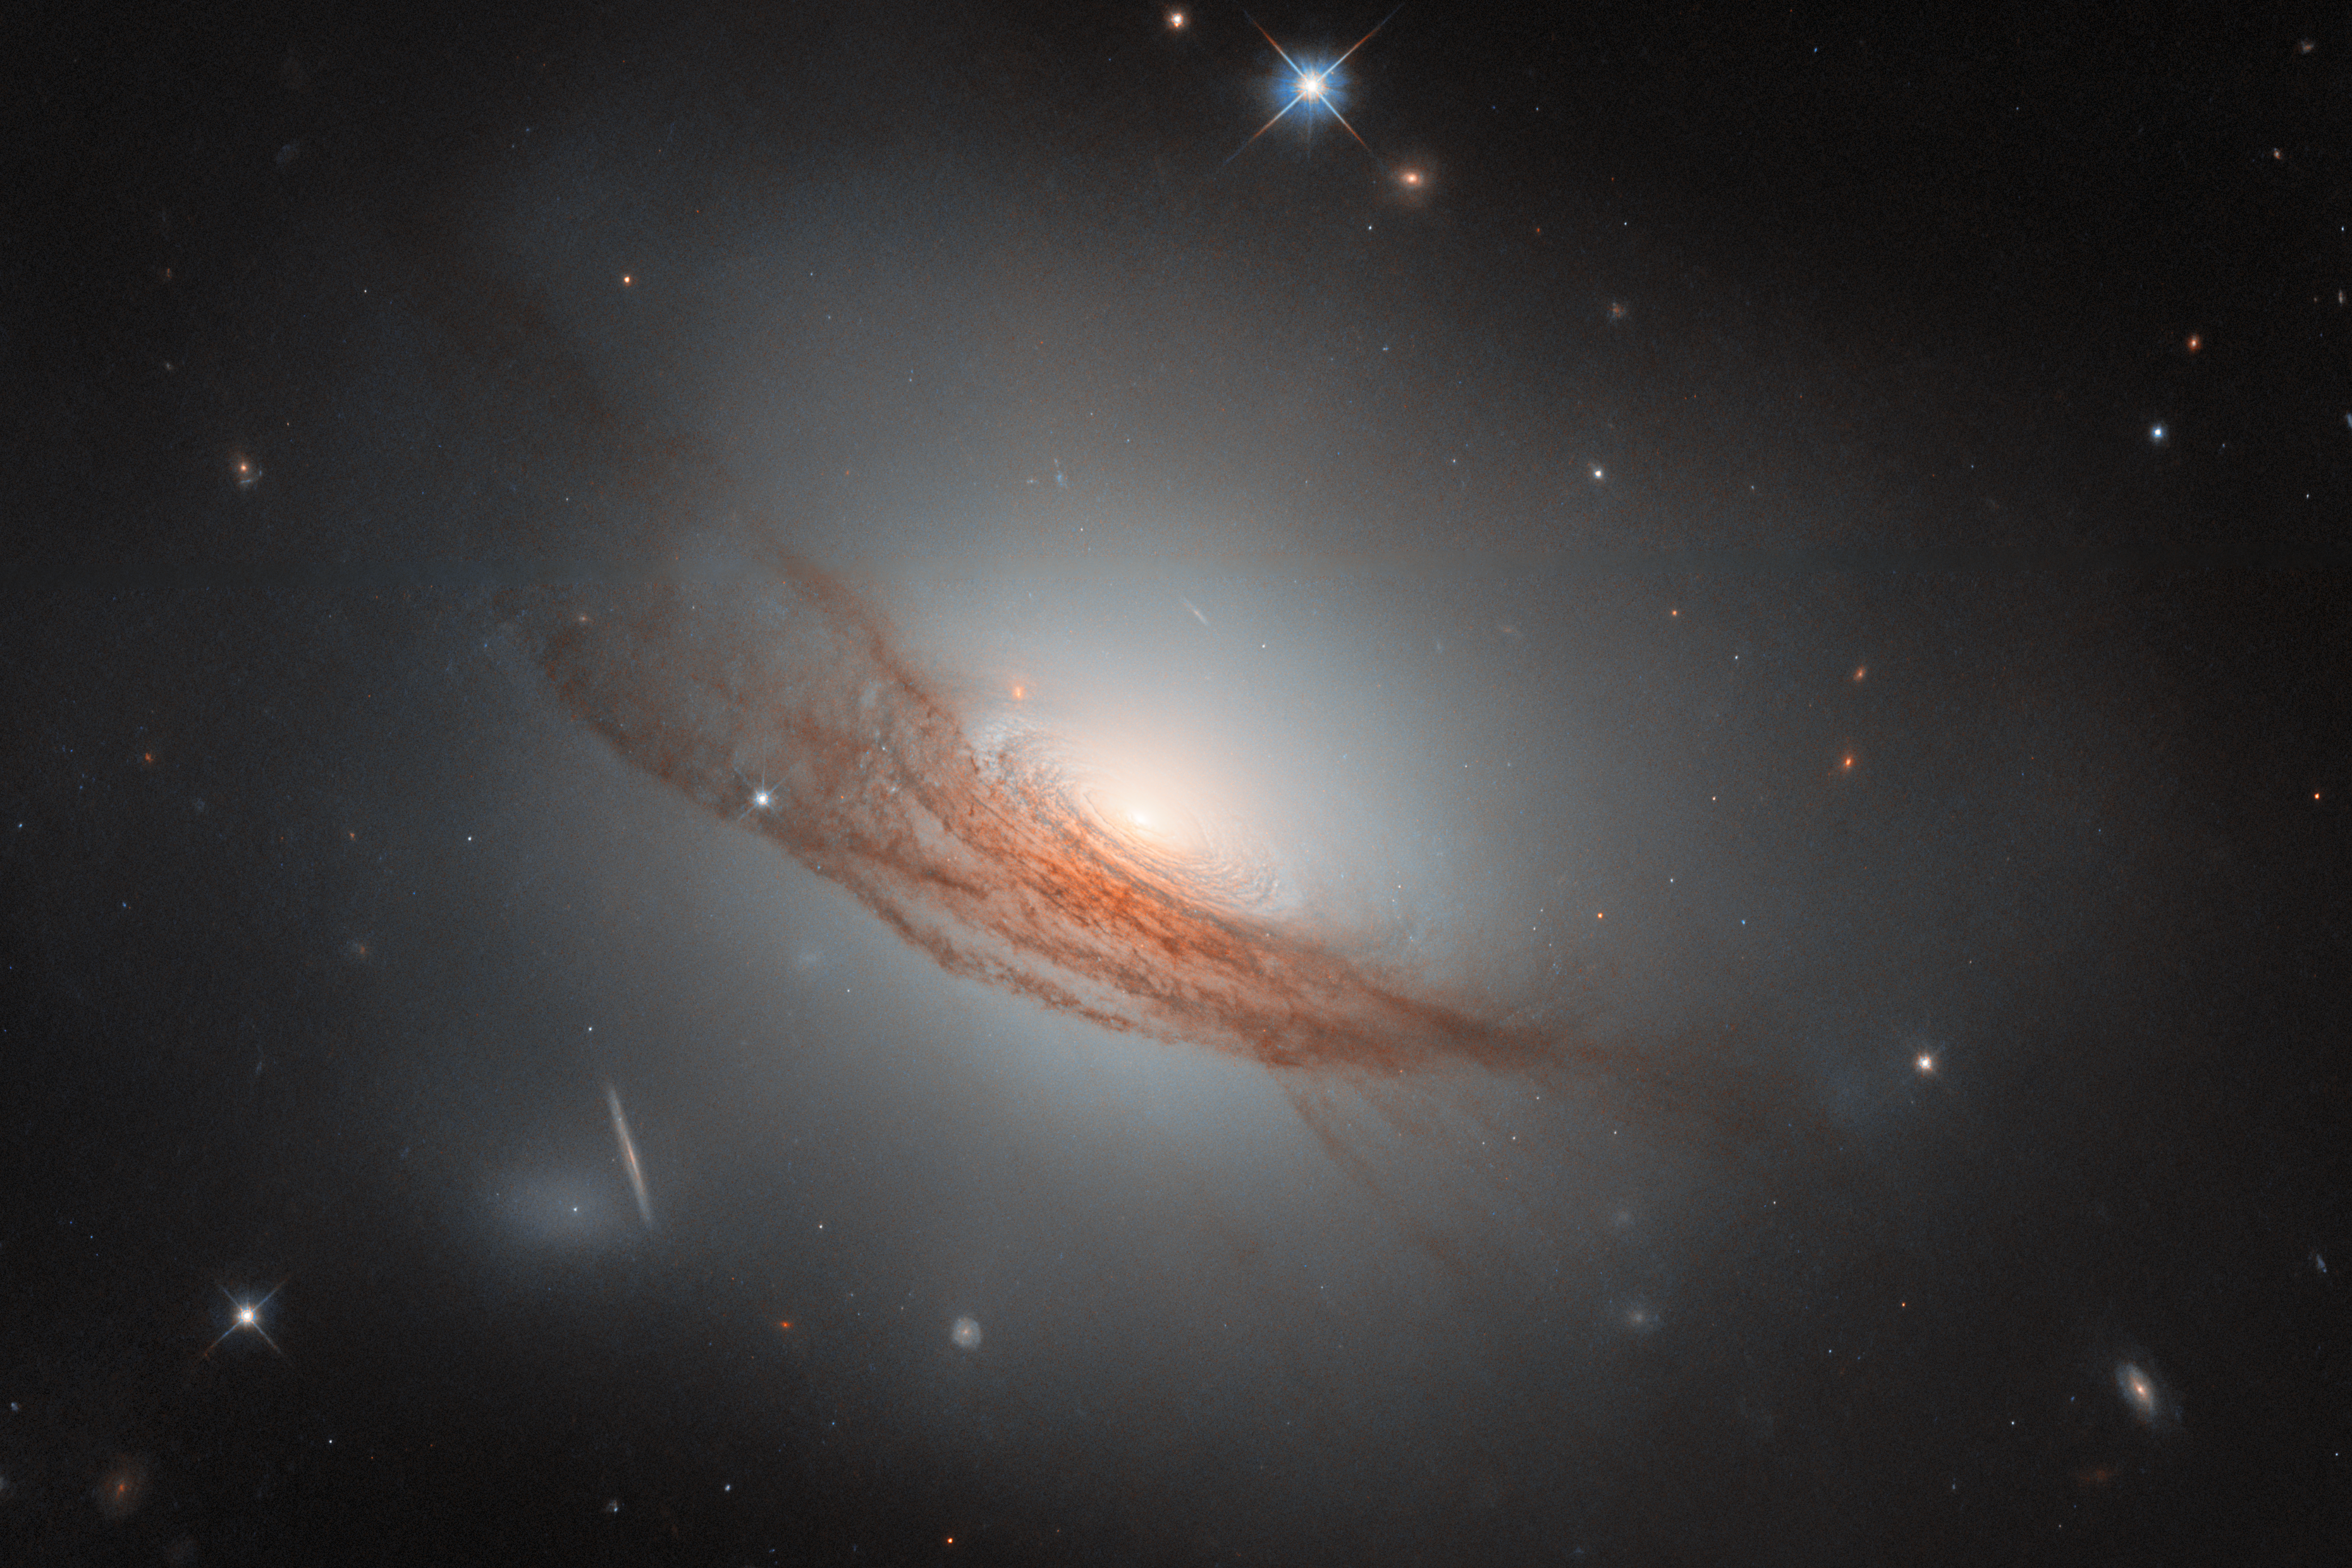

Dark rings and new light

For this Picture of the Month from the NASA/ESA Hubble Space Telescope, we have a sight of an uncommon galaxy with a striking appearance. This is NGC 7722, a lenticular galaxy located about 187 million light-years away in the constellation Pegasus.

A “lenticular”, meaning “lens-shaped”, galaxy is a type that sits in between the more familiar spiral galaxies and elliptical galaxies. It is also less common than these — partly because when a galaxy has an ambiguous appearance, it can be hard to determine if it is actually a spiral, actually an elliptical galaxy, or something in between. Many of the known lenticular galaxies sport features of both spiral and elliptical galaxies. In this case, NGC 7722 lacks the defined arms of a spiral galaxy, while it has an extended, glowing halo and a bright bulge in the centre similar to an elliptical galaxy. Unlike elliptical galaxies, it has a visible disc — concentric rings swirl around its bright nucleus. Its most prominent feature, however, is undoubtedly the long lanes of dark red dust coiling around the outer disc and halo.

This new Hubble image, the sharpest yet taken of NGC 7722, brings the impressive dust lanes into sharp focus. Bands of dust like this are not uncommon in lenticular galaxies, and they stand out against the broad, smooth halo of light that typically surrounds lenticular galaxies. The distinctive dust lanes of NGC 7722 are thought to result from a merger with another galaxy in the past, similar to other lenticular galaxies. It is not yet fully understood how lenticular galaxies form, but mergers and other gravitational interactions are thought to play an important part, reshaping galaxies and exhausting their supplies of gas while bringing new dust.

While it doesn’t host as many new, young stars as a spiral galaxy, there’s still activity in NGC 7722: in 2020 it was host to the explosion of a star that could be detected from Earth. SN 2020SSF was a Type Ia supernova, an event which occurs when a white dwarf star in a binary system siphons enough mass away from its companion star that it grows unstable and explodes. These explosions output a remarkably consistent level of light: by measuring how bright they appear from Earth and comparing against how bright they really are, it’s possible to tell how far away they must be. Type Ia supernovae are one of the best ways to measure distances to galaxies, so understanding exactly how they work is of great importance to astronomers.

Taken with Hubble’s Wide Field Camera 3, this Hubble image was obtained as part of an observing programme (#16691, PI: R. J. Foley) that followed up on recent supernovae. SN 2020SSF is not visible in this image, as it was actually taken two years later, when the supernova had long faded. This was on purpose: the aim of the observations was to witness the aftereffects of the supernova and examine its surroundings, which can only be done once the intense light of the explosion is gone. With Hubble’s clear vision, astronomers can search for radioactive material created by the supernova, catalogue its neighbours to see how old the star likely was, and look for the companion star it left behind — all from almost 200 million light-years away.

Credit: ESA/Hubble & NASA, R. J. Foley (UC Santa Cruz), Dark Energy Survey/DOE/FNAL/DECam/CTIO/NOIRLab/NSF/AURA Acknowledgement: Mehmet Yüksek